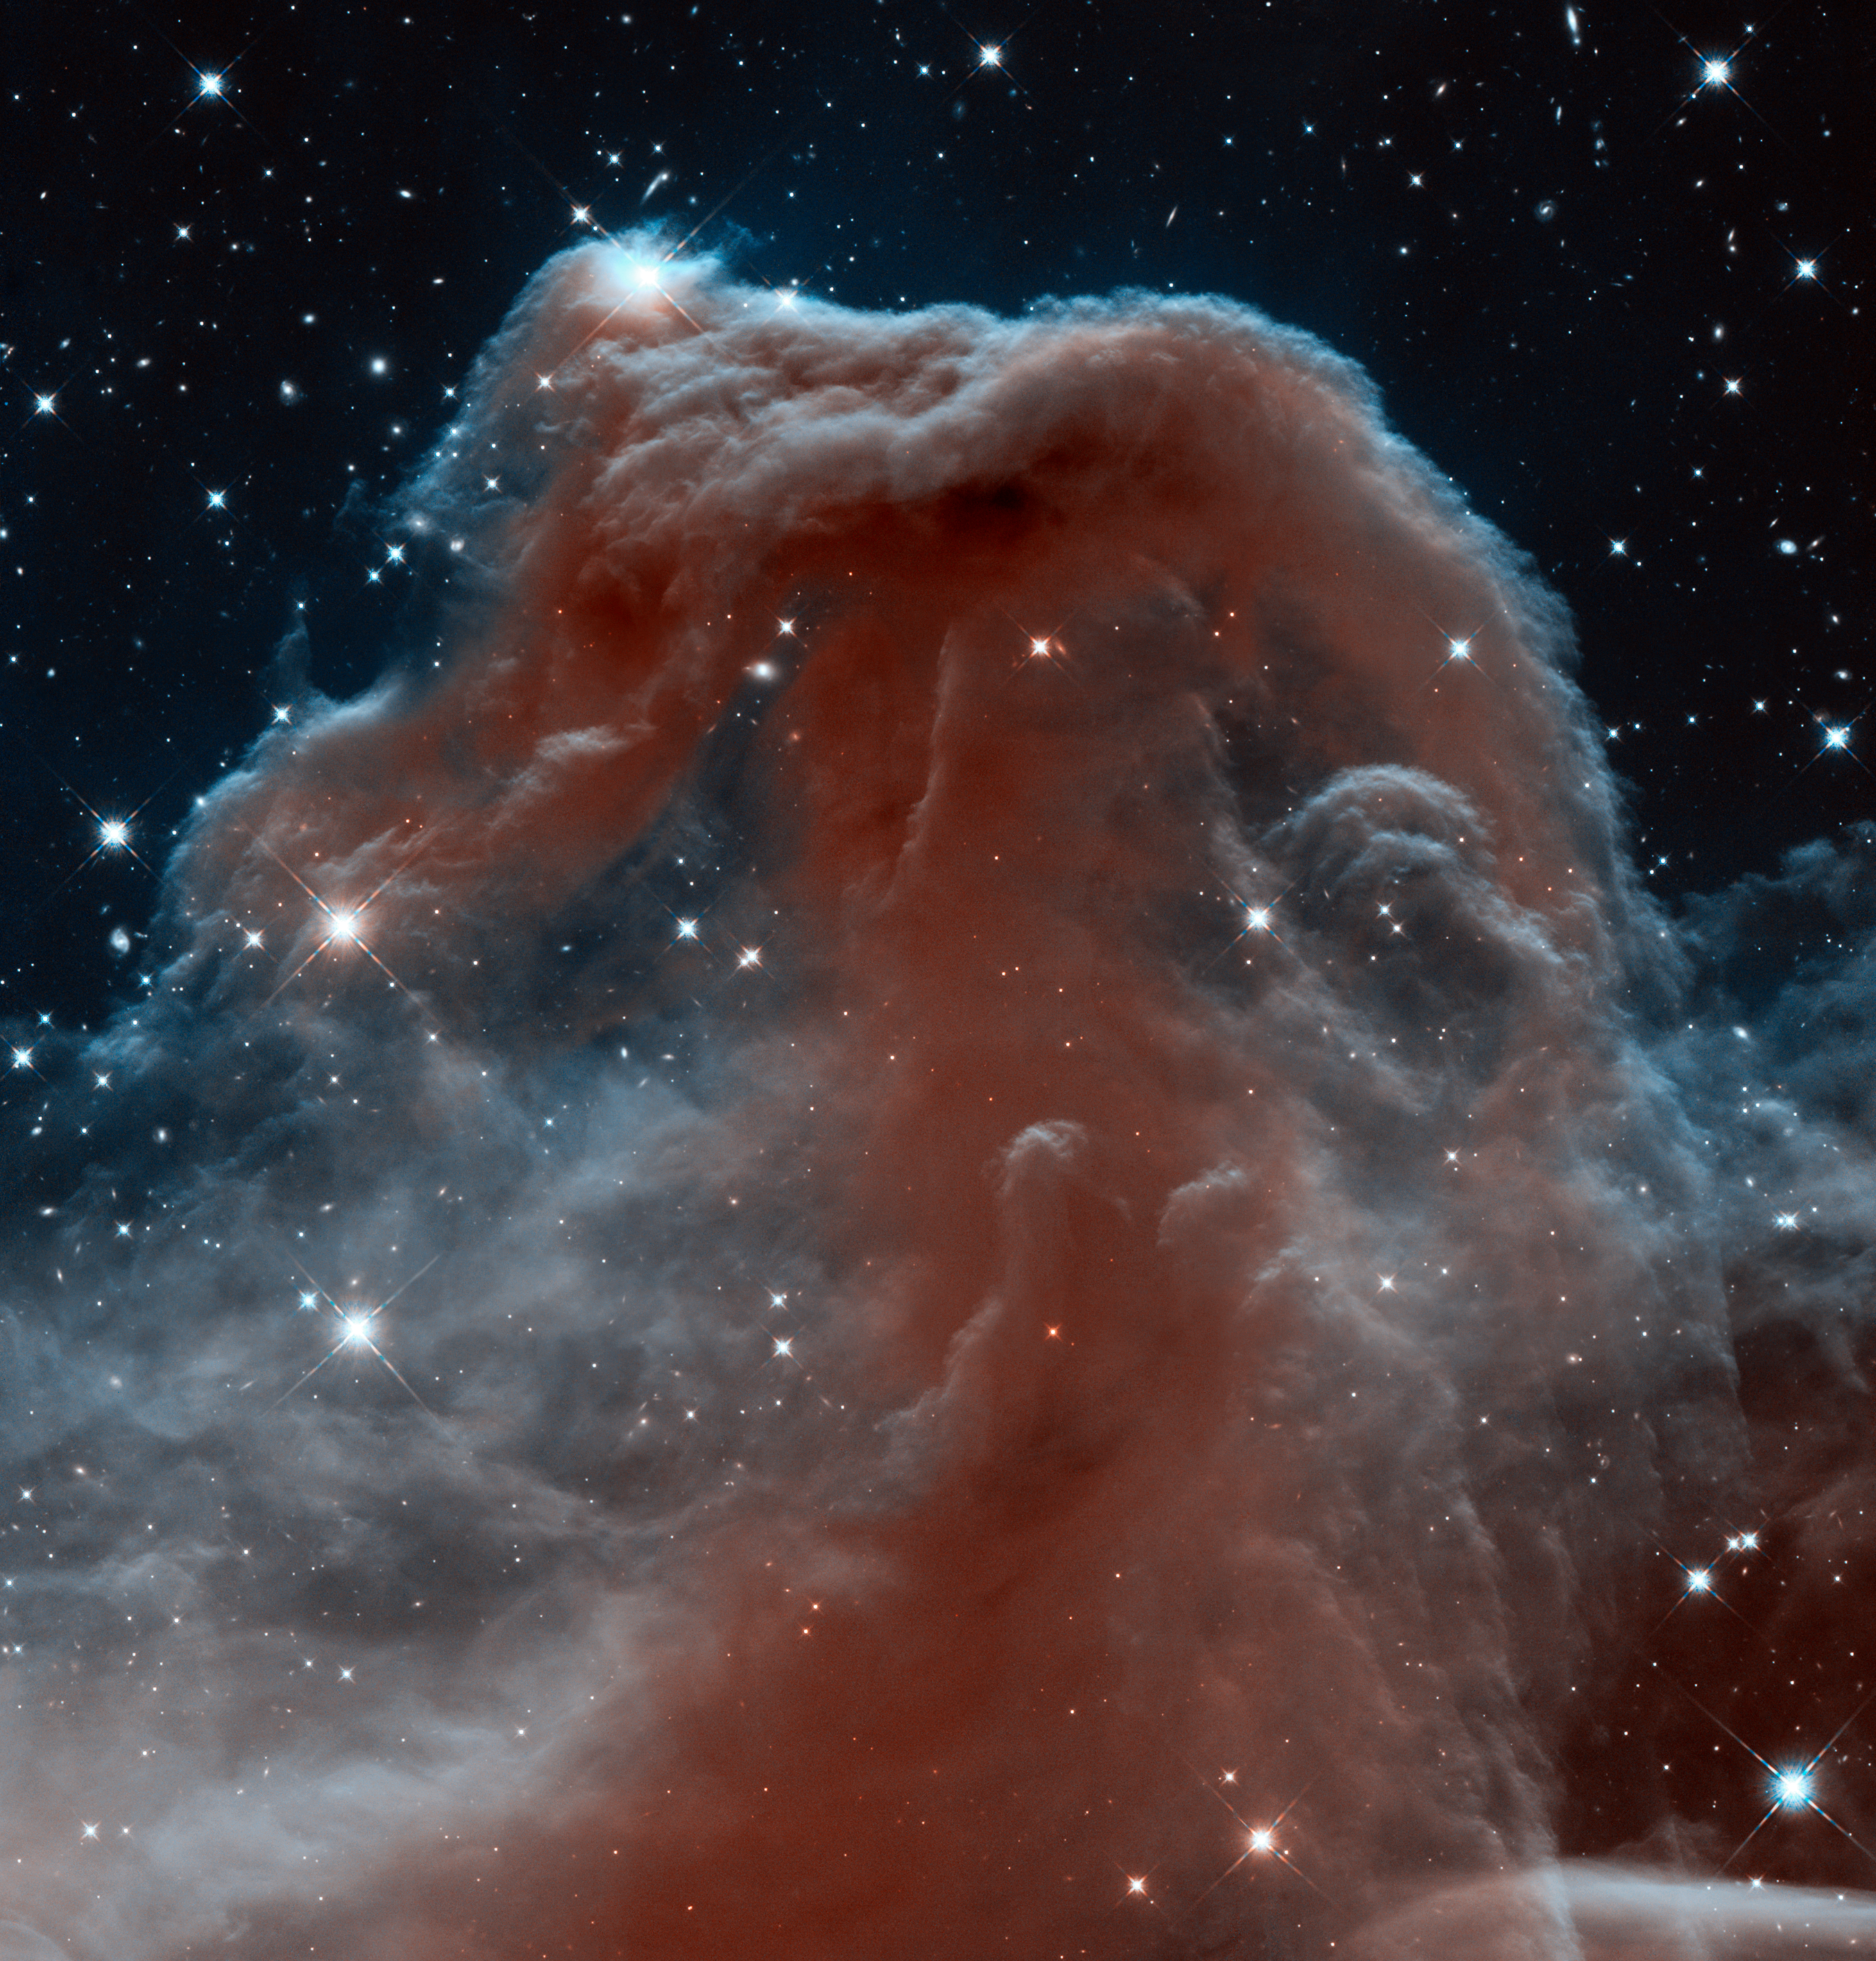

New infrared view of the Horsehead Nebula — Hubble’s 23rd anniversary image

This new Hubble image, captured and released to celebrate the telescope’s 23rd year in orbit, shows part of the sky in the constellation of Orion (The Hunter). Rising like a giant seahorse from turbulent waves of dust and gas is the Horsehead Nebula, otherwise known as Barnard 33.

This image shows the region in infrared light, which has longer wavelengths than visible light and can pierce through the dusty material that usually obscures the nebula’s inner regions. The result is a rather ethereal and fragile-looking structure, made of delicate folds of gas — very different to the nebula’s appearance in visible light.

Credit: NASA, ESA, and the Hubble Heritage Team (AURA/STScI)